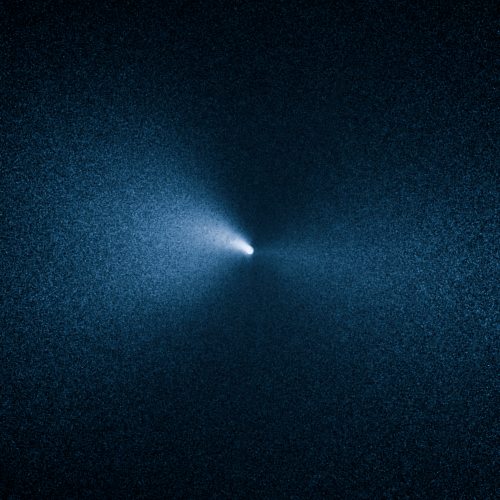

Comet 252P/LINEAR

This image taken by the NASA/ESA Hubble Space Telescope shows Comet 252P/LINEAR as it passed by Earth. The visit was one of the closest encounters between a comet and our planet.

Credit: NASA, ESA, and J.-Y. Li (Planetary Science Institute)